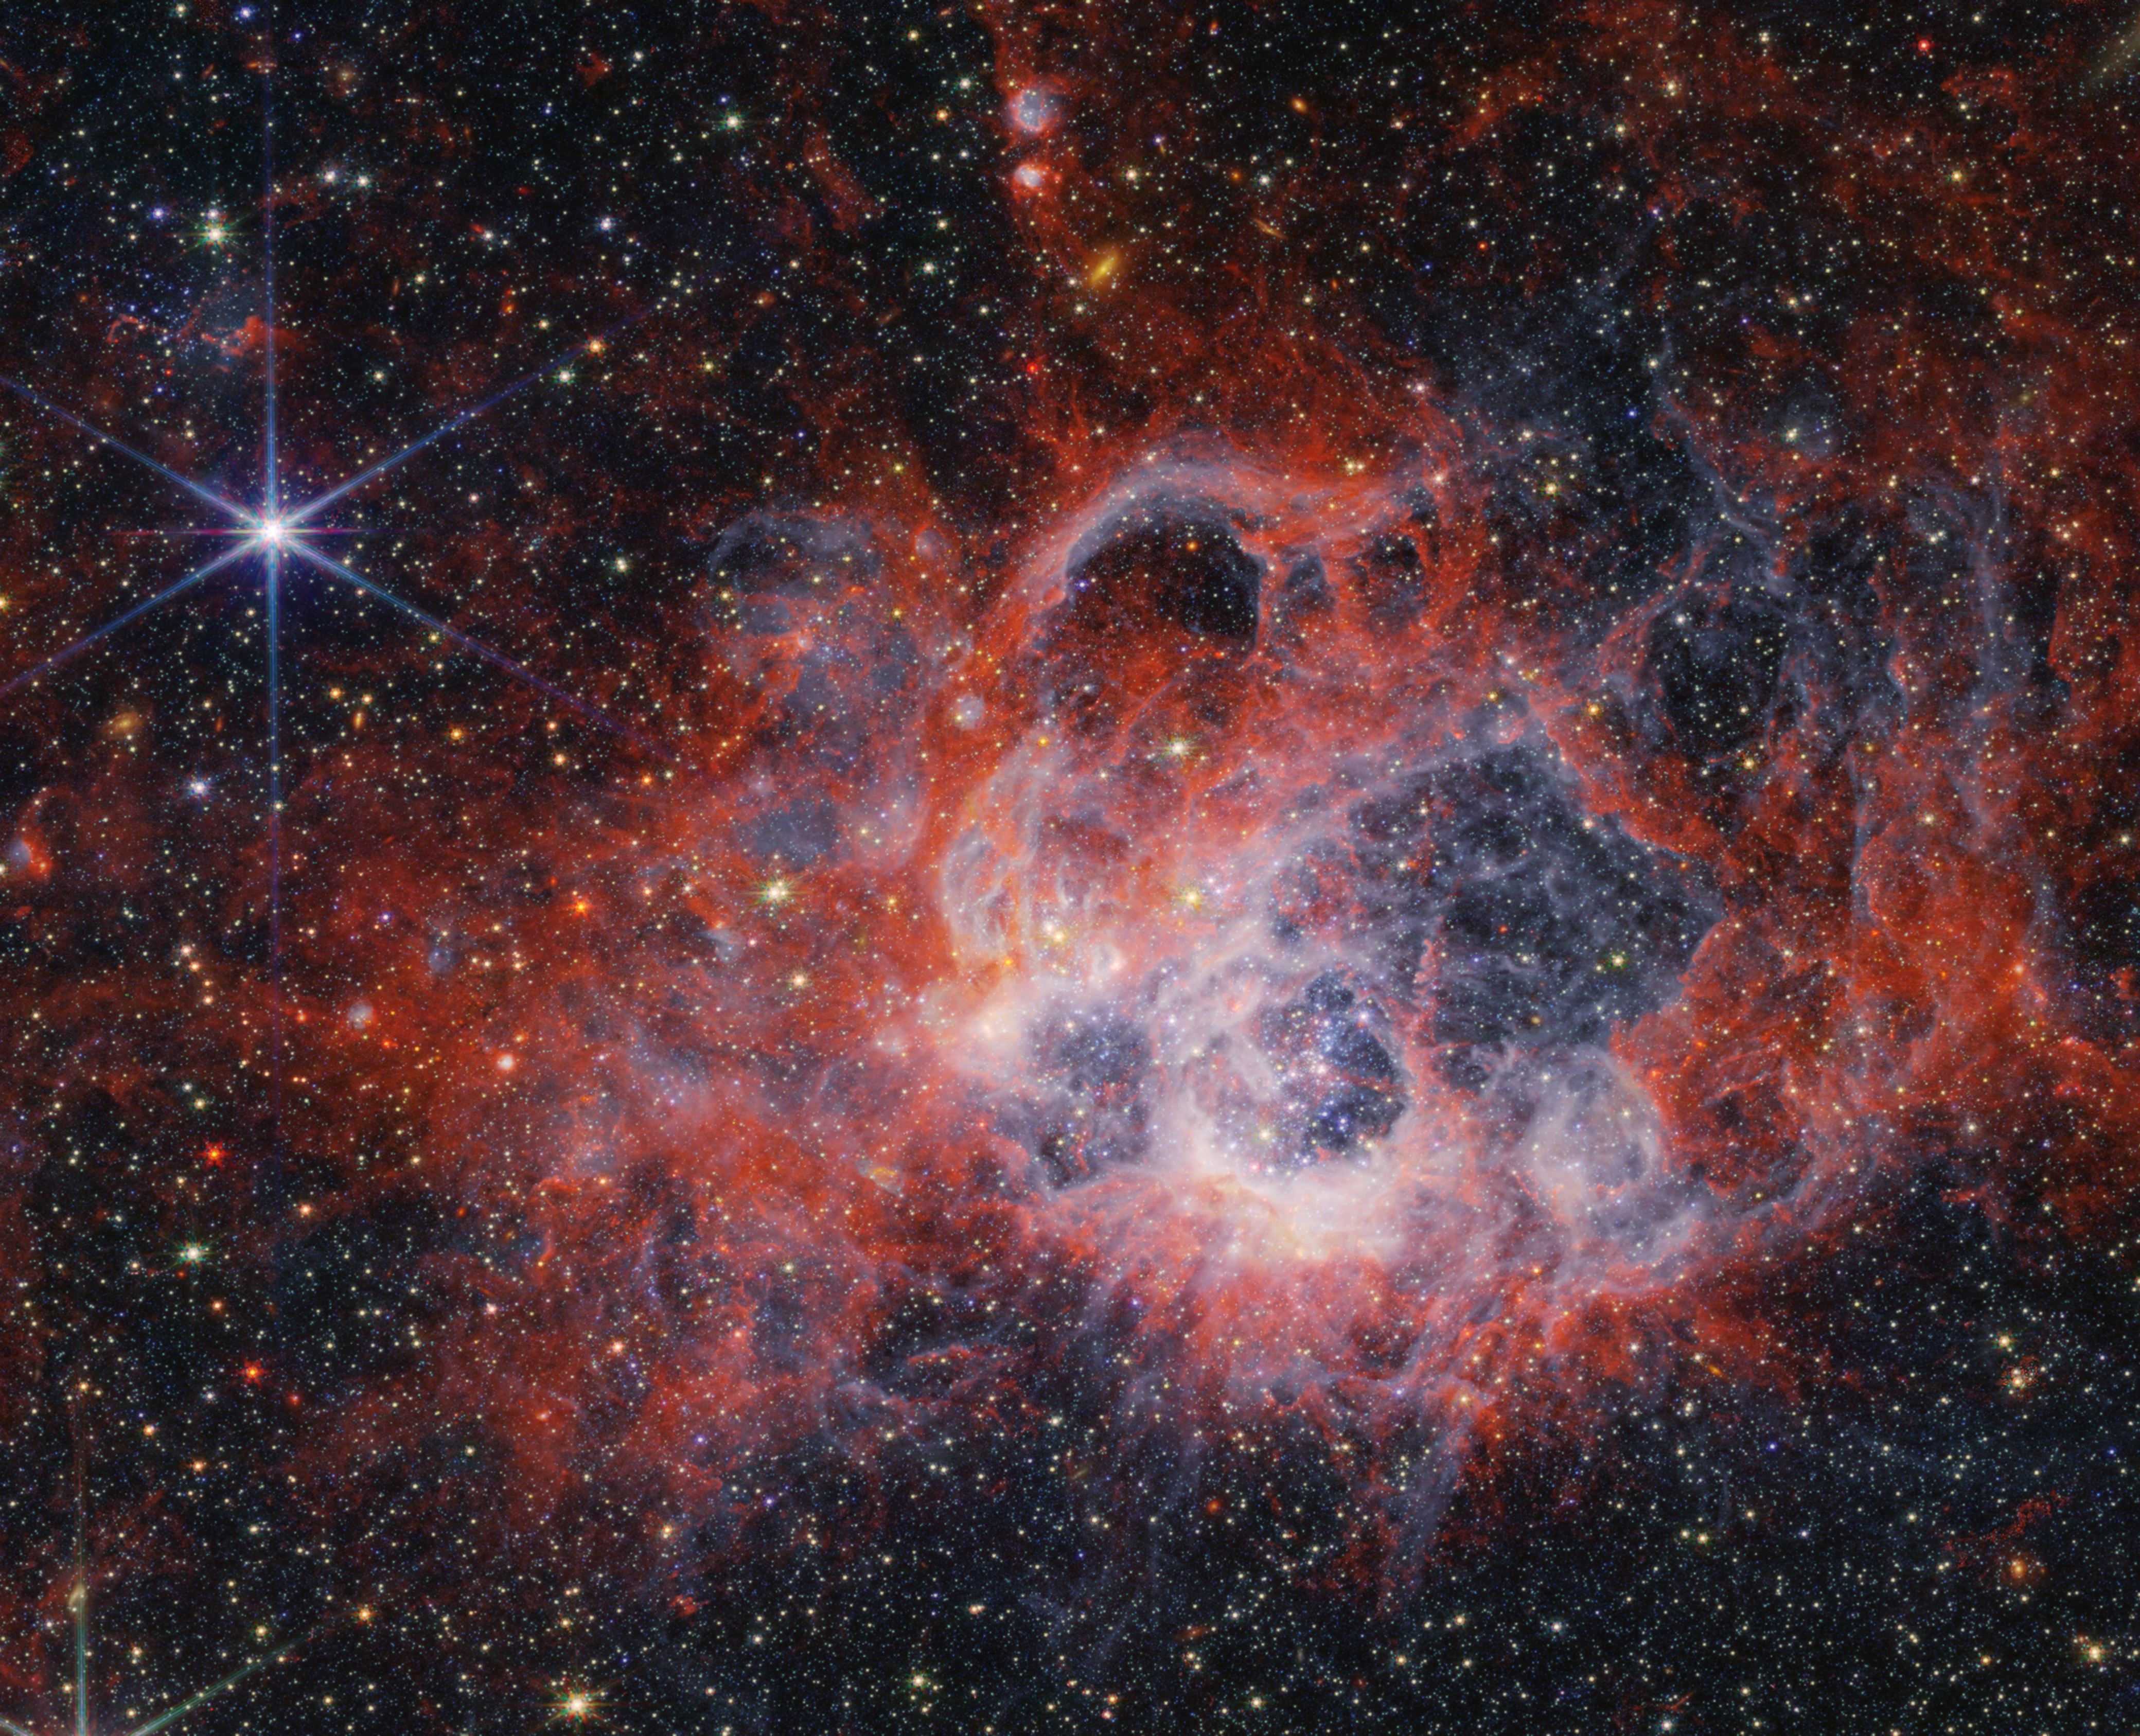

NGC 604 (NIRCam image)

This image from the NASA/ESA/CSA James Webb Space Telescope’s NIRCam (Near-Infrared Camera) of star-forming region NGC 604 shows how stellar winds from bright, hot young stars carve out cavities in surrounding gas and dust.

The bright orange streaks in this image signify the presence of carbon-based molecules known as polycyclic aromatic hydrocarbons, or PAHs. As you travel further from the immediate cavities of dust where the star is forming, the deeper red signifies molecular hydrogen. This cooler gas is a prime environment for star formation. Ionised hydrogen from ultraviolet radiation appears as a white and blue ghostly glow.

NGC 604 is located in the Triangulum Galaxy (M33), 2.73 million light-years away from Earth. It provides an opportunity for astronomers to study a high concentration of very young, massive stars in a nearby region.

Credit: NASA, ESA, CSA, STScI